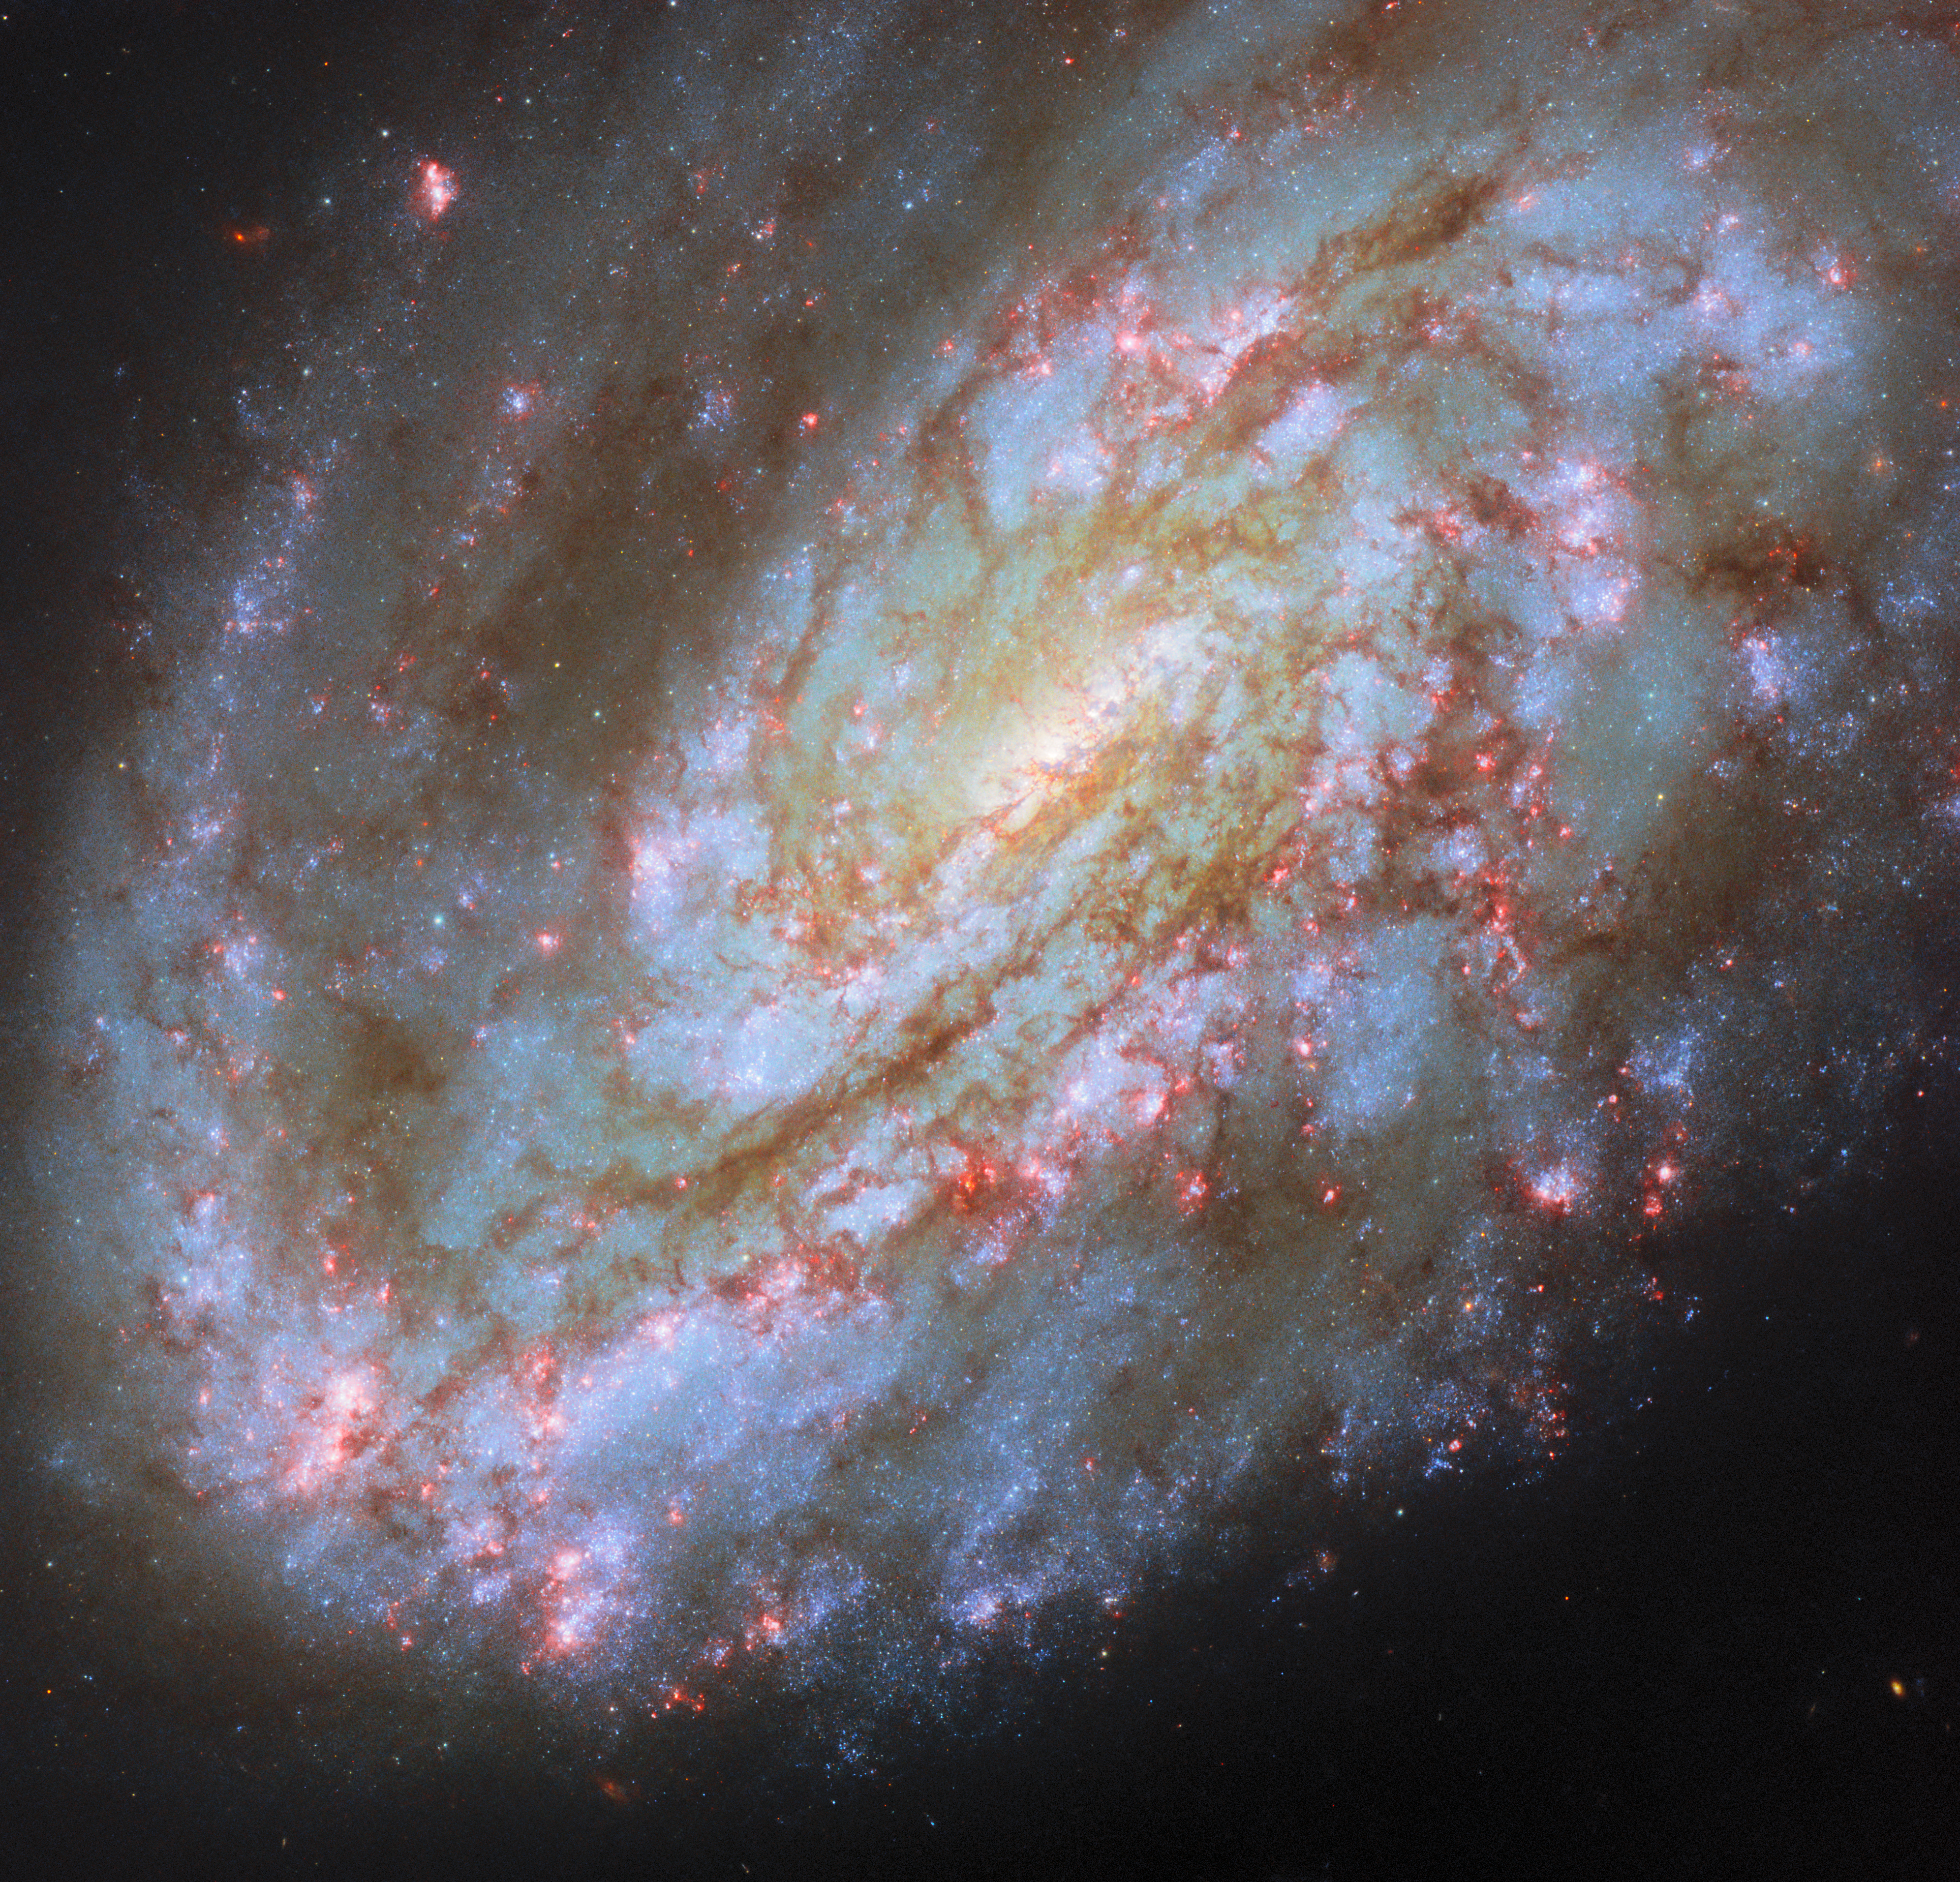

One-sided spiral

The subject of this ESA/Hubble Picture of the Month is a spiral galaxy struggling against some of the titanic forces that appear on galactic scales in space. This is NGC 4654, an intermediate spiral galaxy in the constellation Virgo (the Maiden). “Intermediate” means that it lies between the spiral galaxies that have a bar across the centre and those that don’t, with a weak bar structure in its centre. It is situated 72 million light-years from Earth in the Virgo Cluster, a particularly massive and populous galaxy cluster.

NGC 4654 is particularly asymmetric, with a rounded and clearly-defined edge on one side and a long tail of gas stretching out from the opposite side — beyond Hubble’s view in this image. The cause of this gaseous tail is the same as for many of the other galaxies jostling in the crowded Virgo Cluster: namely, ram pressure stripping. NGC 4654 moves with such high velocity through space that it sweeps up and rams through the intracluster medium, the hot, rarefied gas filling the space between the Virgo Cluster’s galaxies. The intracluster medium in turn exerts a “ram pressure” on the galaxy, compressing the galaxy’s leading edge and tugging at its gas, creating the elongated tail.

It’s not just the galaxy’s gas that is unevenly distributed: its stars are too, and this is more unusual for a spiral galaxy. While the spiral arm on its leading edge is rich with stars and gas, the opposite arm noticeably lacks stars, influencing the galaxy’s lopsided spiral shape. It’s thought that ram pressure alone is unlikely to have had this effect. Rather, NGC 4654 has also been subjected to the gravitational force of the fellow Virgo Cluster galaxy NGC 4639. While the two galaxies are far apart now, it’s thought that a fly-by interaction between them around 500 million years ago ripped away NGC 4654’s gas along one side, limiting star formation there and creating the asymmetry in its shape.

Many galaxies that undergo ram pressure stripping suffer reduced star formation rates as the cold gas that collapses to form their stars is pulled away and lost. NGC 4654, however, is still forming nearly two Suns’ worth of stars every year, a rate comparable to other galaxies of similar size. The active star formation can be seen in the latest Hubble data used in this image, which picks up on a wavelength of red light that’s emitted by the clouds of energised gas where newborn stars lurk. The bright pink bubbles appear all across NGC 4654, from its forward spiral arm, to around its weak bar, and out to the edge of its disc.

The data used for this image come from two observing programmes (#15654, #17502) that have the aim of linking gas in galaxies with star formation. By observing many prominent galaxies in the vicinity of our own, researchers hope to better understand how gas moves around in galaxies, where and when it collapses to form stars and star clusters, and what effect those new stars have on the gas around them.

Credit: ESA/Hubble & NASA, D. Thilker, J. Lee and the PHANGS-HST Team